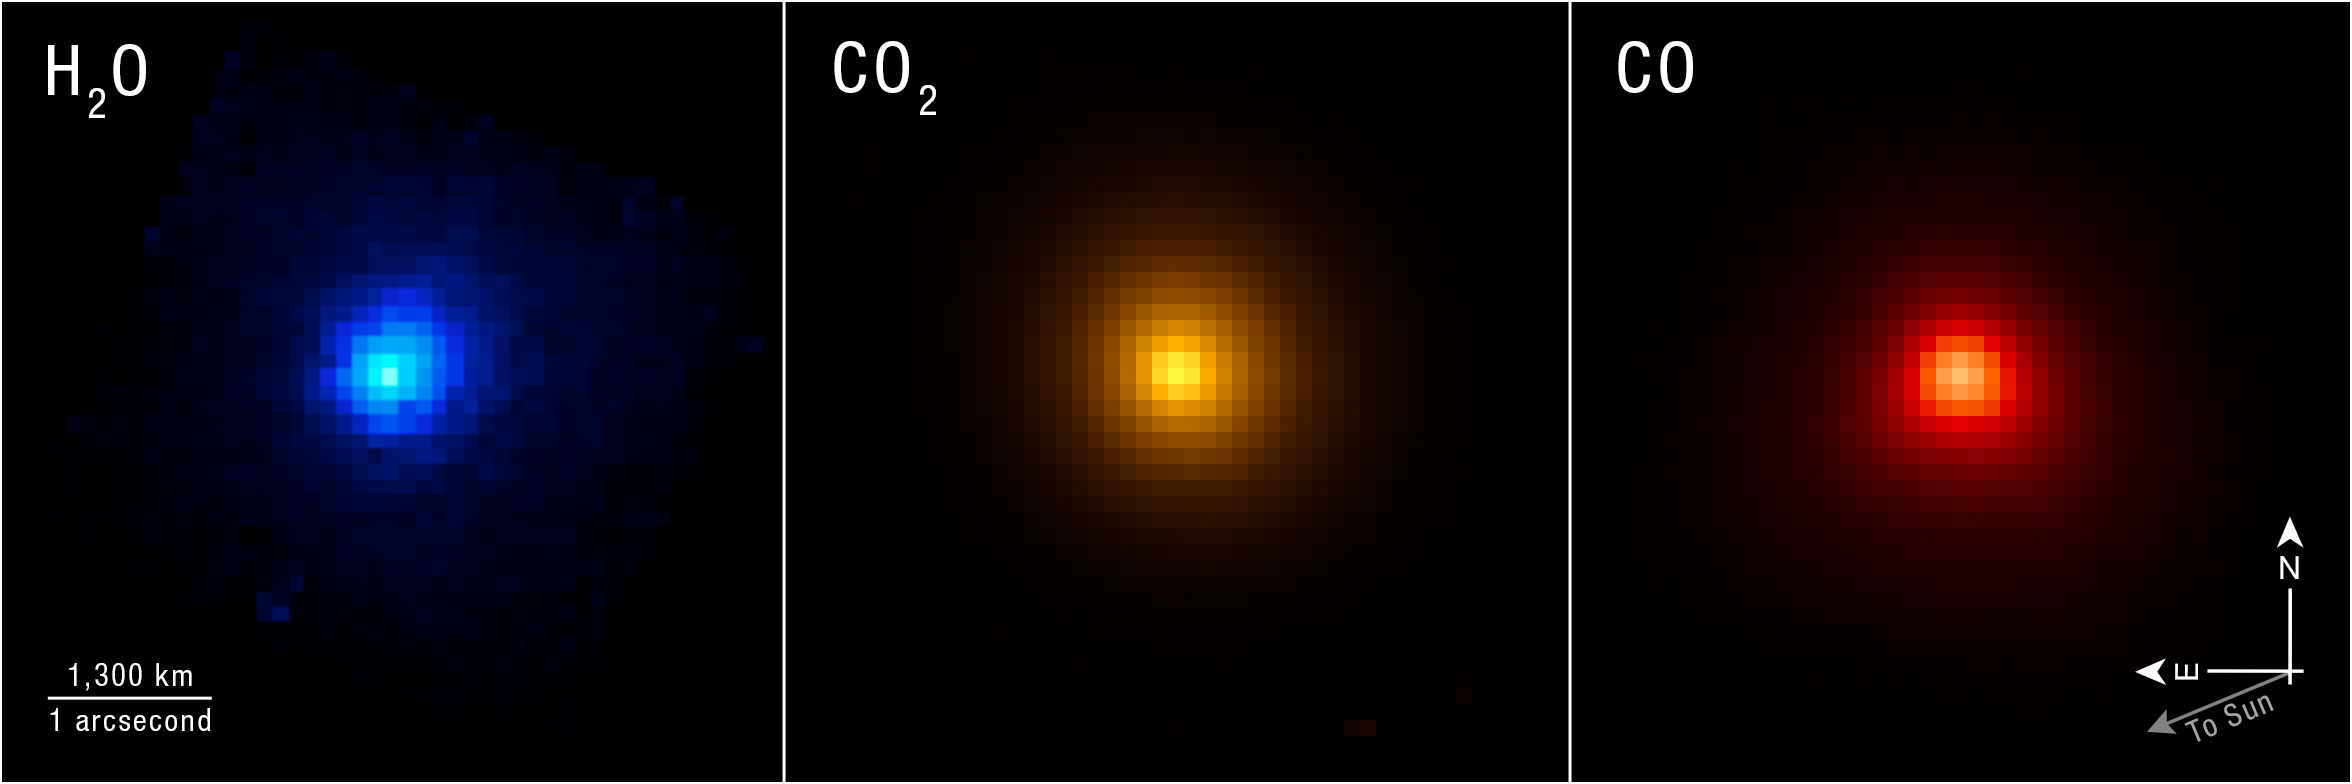

Interstellar Comet 3I/ATLAS (NIRSpec IFU)

Webb’s NIRSpec (Near-Infrared Spectrograph) instrument can map specific chemical and molecular signatures, as seen here in its three images of comet 3I/ATLAS, each highlighting a part of the comet’s contents.

Researchers use NIRSpec’s Integral Field Unit, which provides a spectrum of every image pixel, to dive deeper into the details of cosmic objects than they can with the telescope’s imaging instruments alone. This is crucial for a rare object like 3I/ATLAS, which is only the third comet from outside the Solar System ever studied, and the first to be observed by an instrument capable of capturing as much detail as NIRSpec. With NIRSpec’s data, researchers can build a picture of where the comet may have come from and what its home system was like and then compare that to familiar conditions in the Solar System.

Credit: NASA, ESA, CSA, STScI, M.Cordiner (Catholic University of America, GSFC)